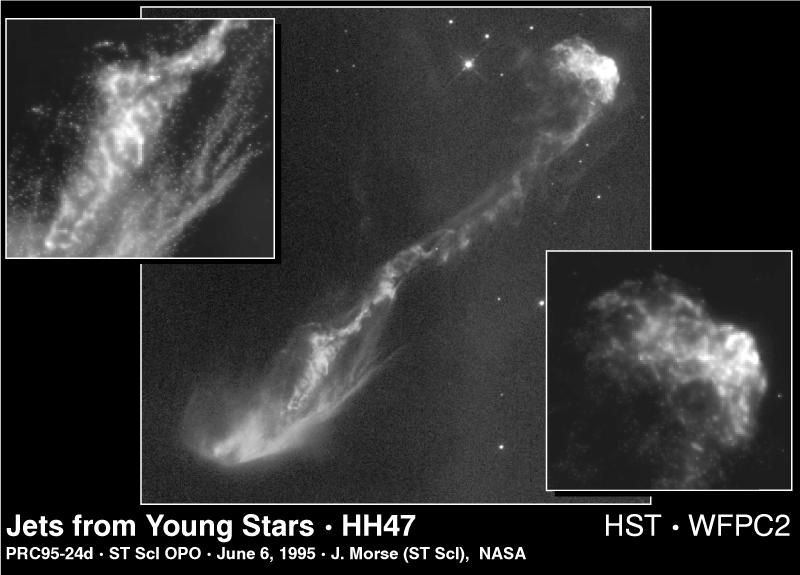

Jet from HH-47

This Hubble Space Telescope image reveals new secrets of star birth as recorded in a spectacular jet of gas the star has ejected.

Center Image

Resembling the vertebrae of an imaginary space alien, this one-half light-year long jet of gas has burst out of a dark cloud of gas and dust which hides the newly forming star located in the lower left corner of the image.

Upper Left Image

An enlargement of a portion of the jet near the star shows the complicated interactions that take place when the ejected gas collides with the interstellar medium.

Lower Right Image

A massive clump of jet material collides with upstream gas and creates a bow-shaped shock wave, like a boat speeding across a lake.

Credit: J. Morse (STScI), and NASA/ESA Co-investigators: B. Reipurth (European Southern Observ.), S. Heathcote (Cerro Tololo Inter-American Observ.), P. Hartigan (Rice Univ.), J. Bally (Univ. of Colorado), R. Schwartz (Univ. of Missouri), J. Stone (Univ. of Maryland)